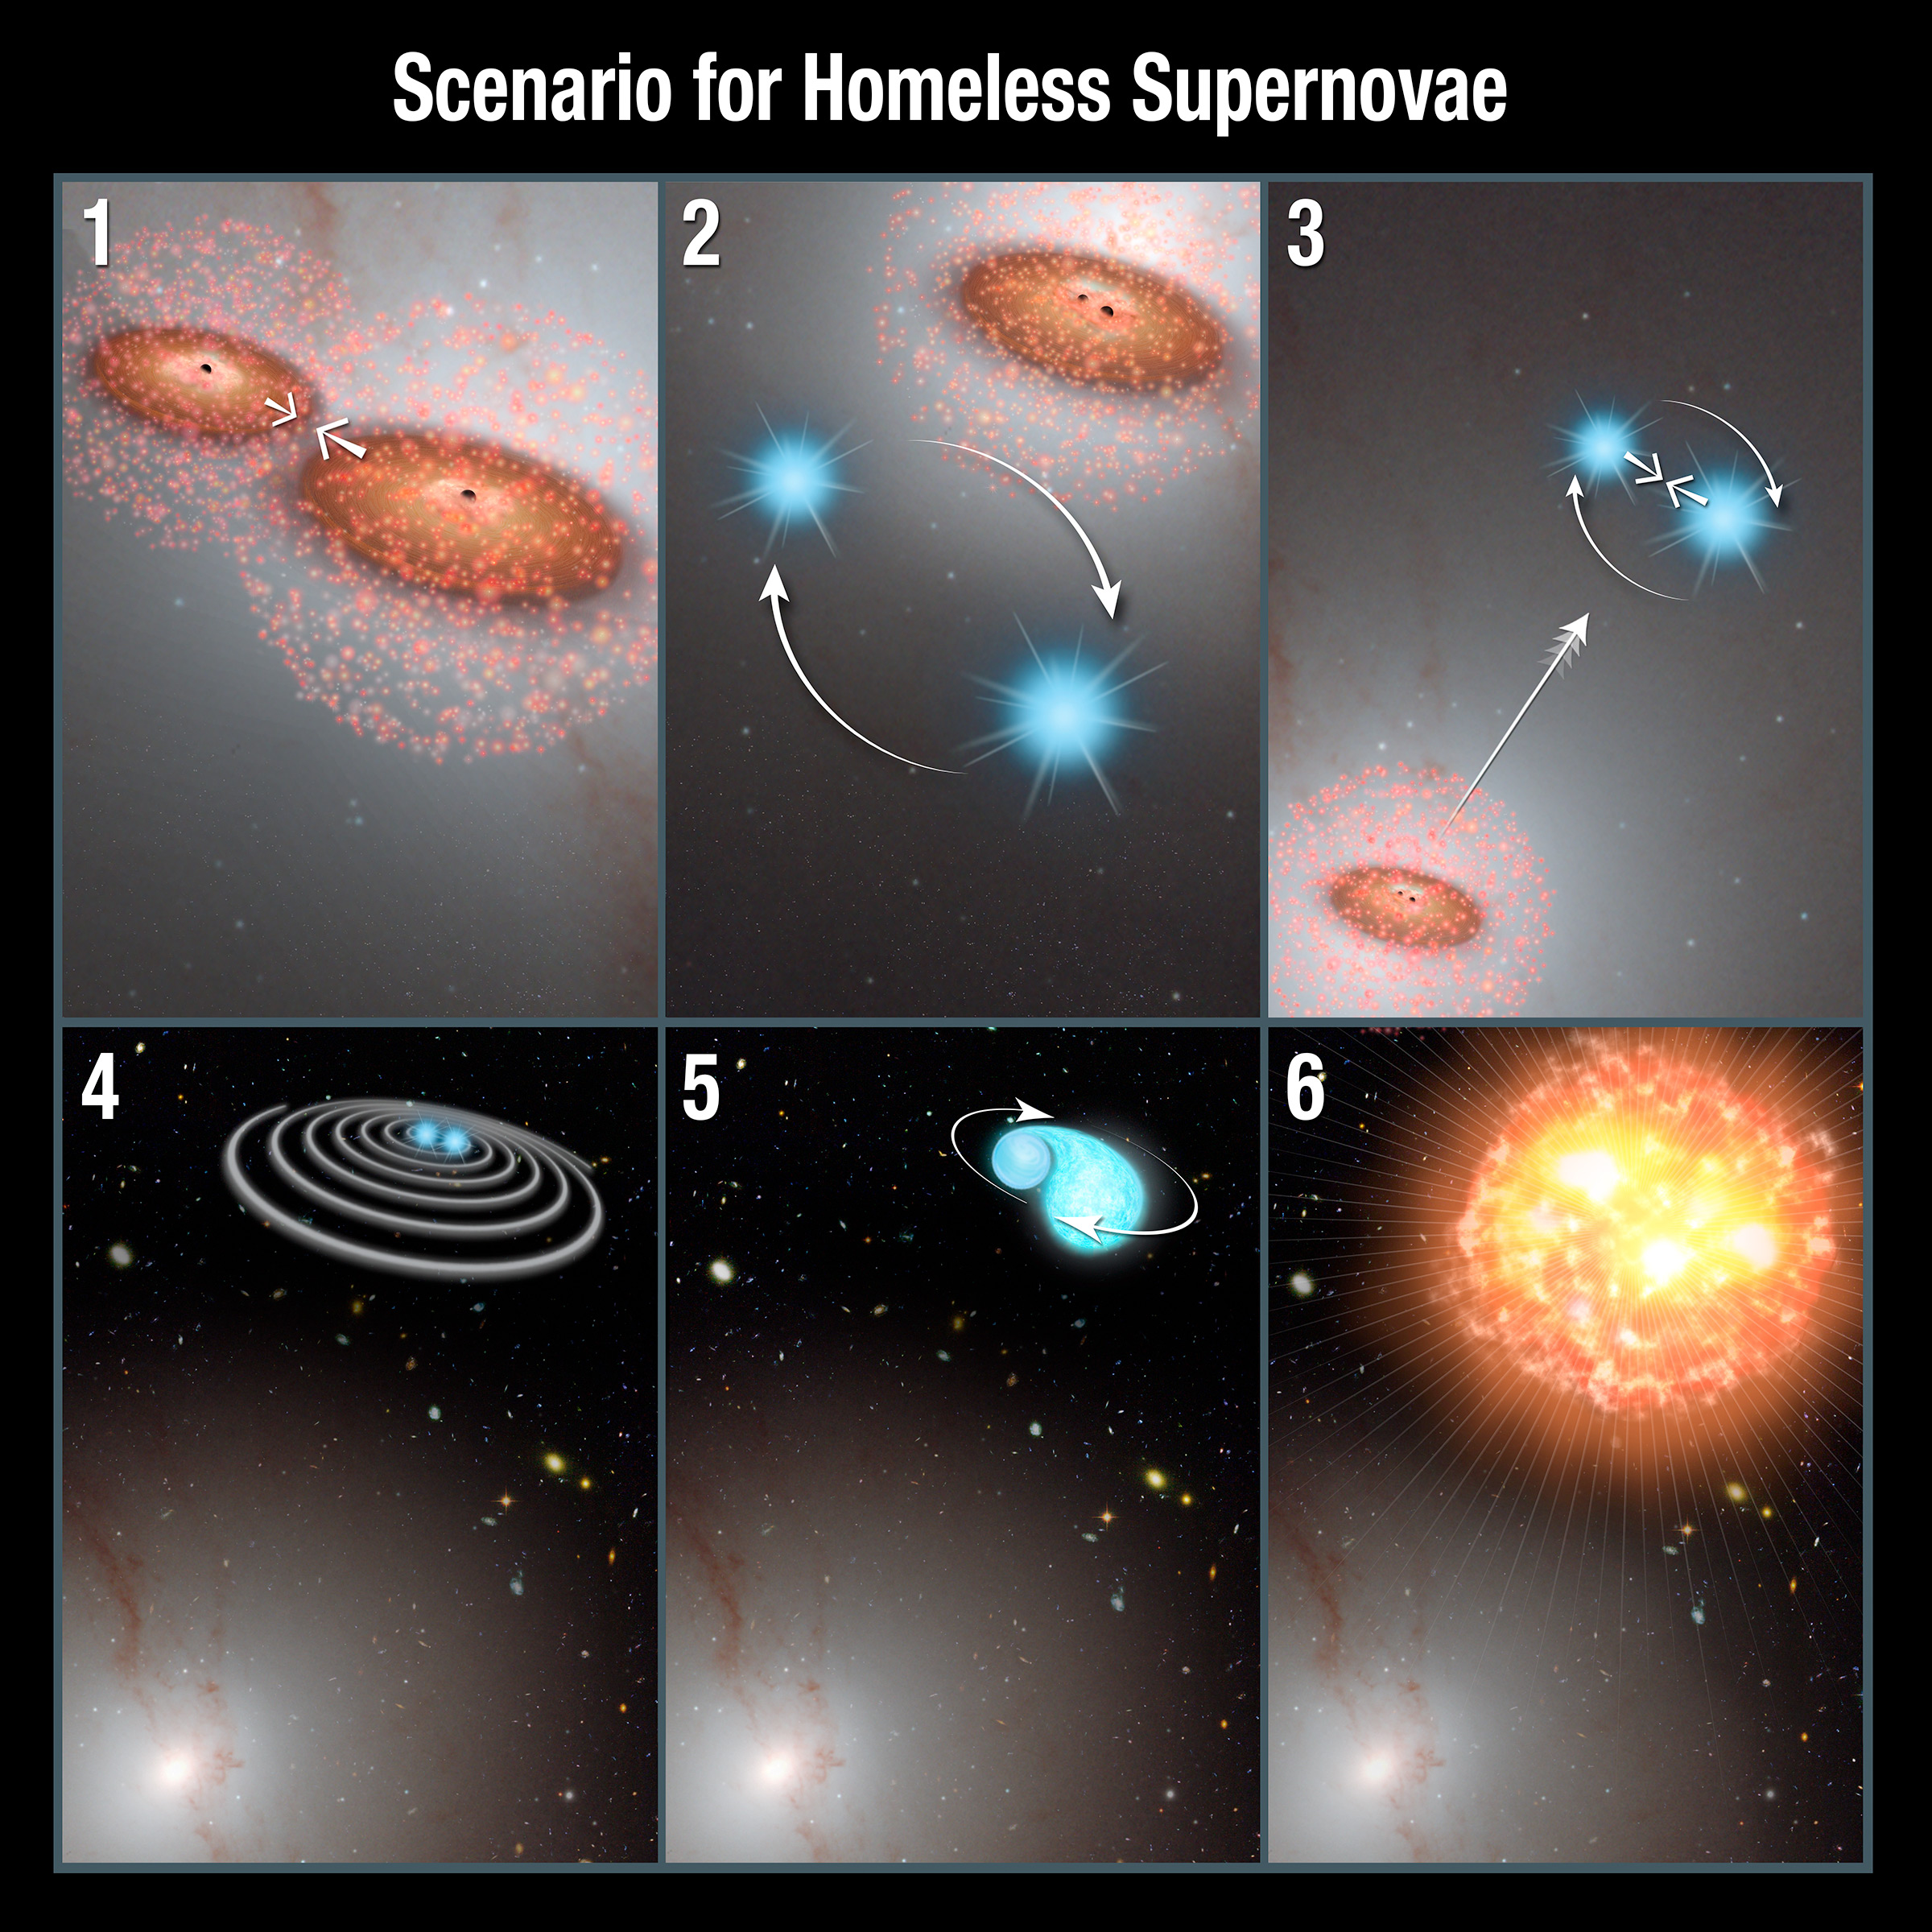

Scenario for Homeless Supernovae

This illustration offers a plausible scenario for how vagabond stars exploded as supernovae outside the cozy confines of galaxies.

A pair of black holes comes together during a galaxy merger, dragging with them up to a million stars each.
A double-star system wanders too close to the two black holes.
The black holes then gravitationally catapult the stars out of the galaxy. At the same time, the stars are brought closer together.
After getting booted out of the galaxy, the binary stars move even closer together as orbital energy is carried away from the duo in the form of gravitational waves.
Eventually, the stars get close enough that one of them is ripped apart by tidal forces.
As material from the dead star is quickly dumped onto the surviving star, a supernova occurs.

Credit: NASA, ESA, and P. Jeffries and A. Feild (STScI)